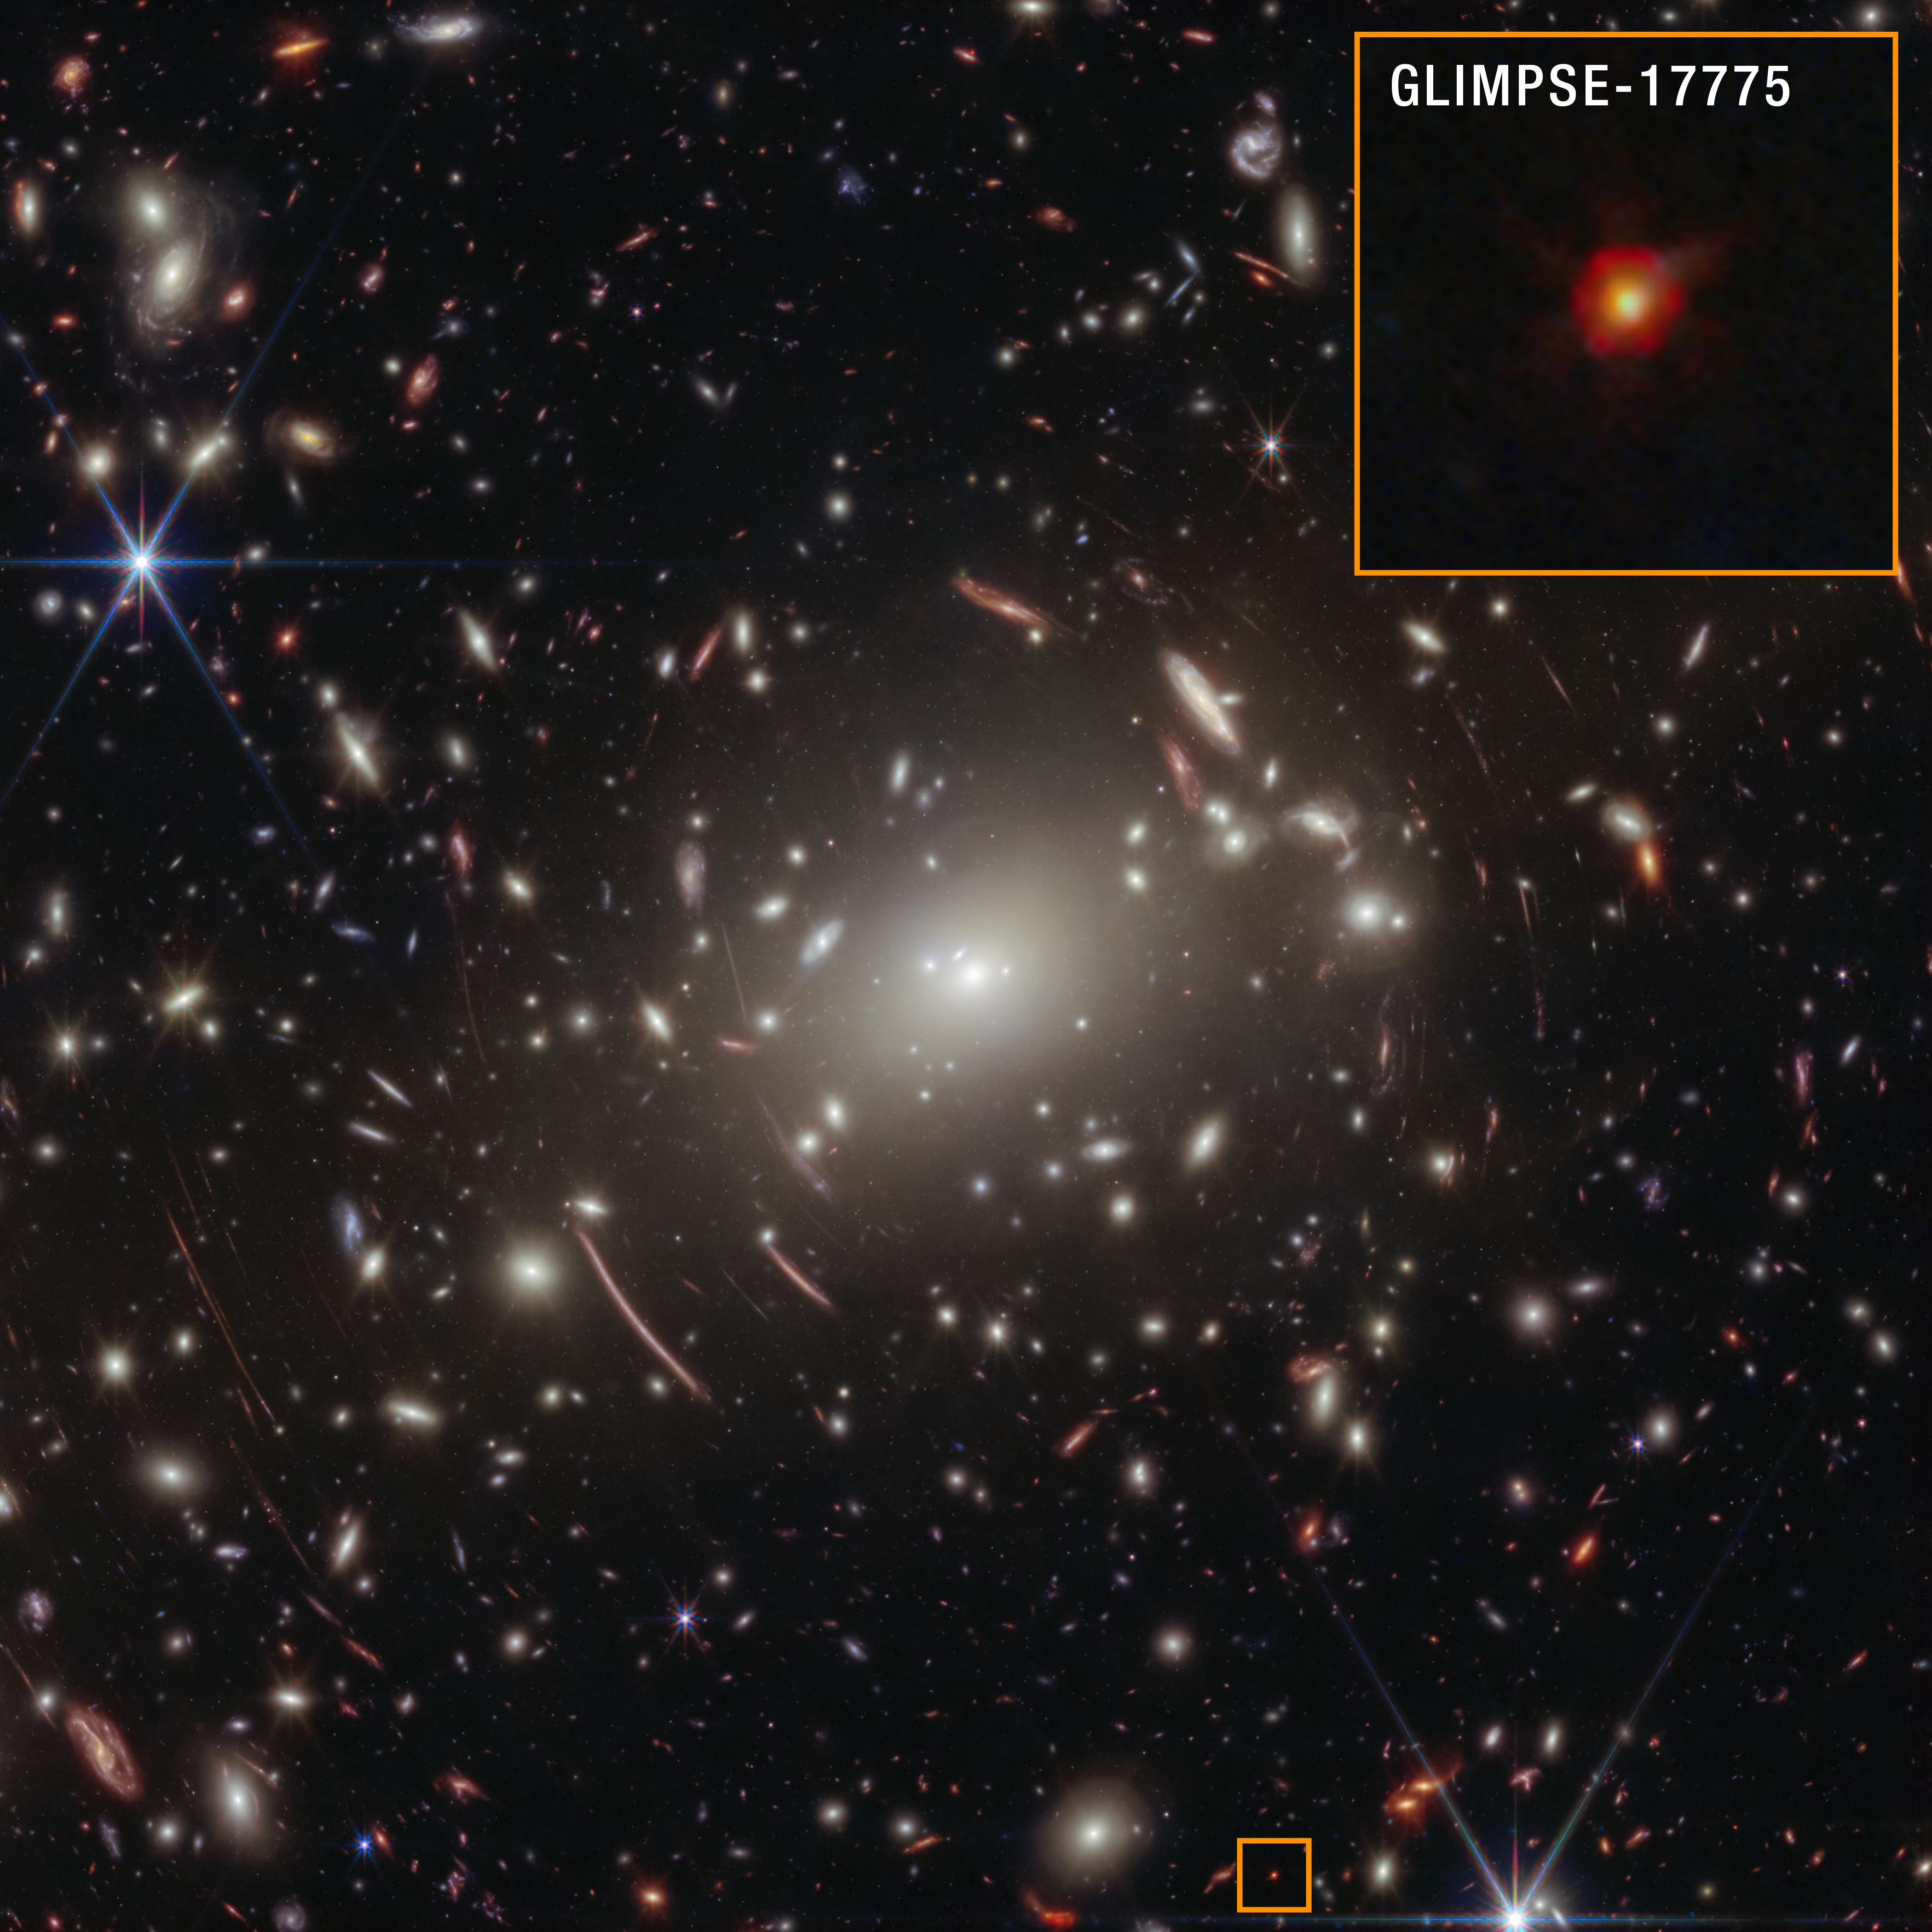

GLIMPSE-17775 in Abell S1063 (NIRCam image annotated)

The little red dot that would come to be known as GLIMPSE-17775 was fortunately included in the NASA/ESA/CSA James Webb Space Telescope’s field of view as it was observing galaxy cluster Abell S1063 for a different scientific purpose. GLIMPSE-17775 is located behind the galaxy cluster and has a cosmological redshift of 3.5, meaning it existed about 1.8 billion years after the Big Bang.

Since galaxy clusters like Abell S1063 are some of the most massive objects in the Universe, light emitted by objects farther away can become distorted as it reaches the telescope. This effect is known as gravitational lensing. The combination of Webb’s 30 hours of observing time and gravitational lensing enabled scientists to obtain the deepest spectrum to date of a little red dot. The result: the strongest evidence to date of a hot, dense gas cocoon known as a “black hole star.”

Credit: NASA, ESA, CSA, V. Kokorev (University of Texas at Austin), A. Pagan (STScI)